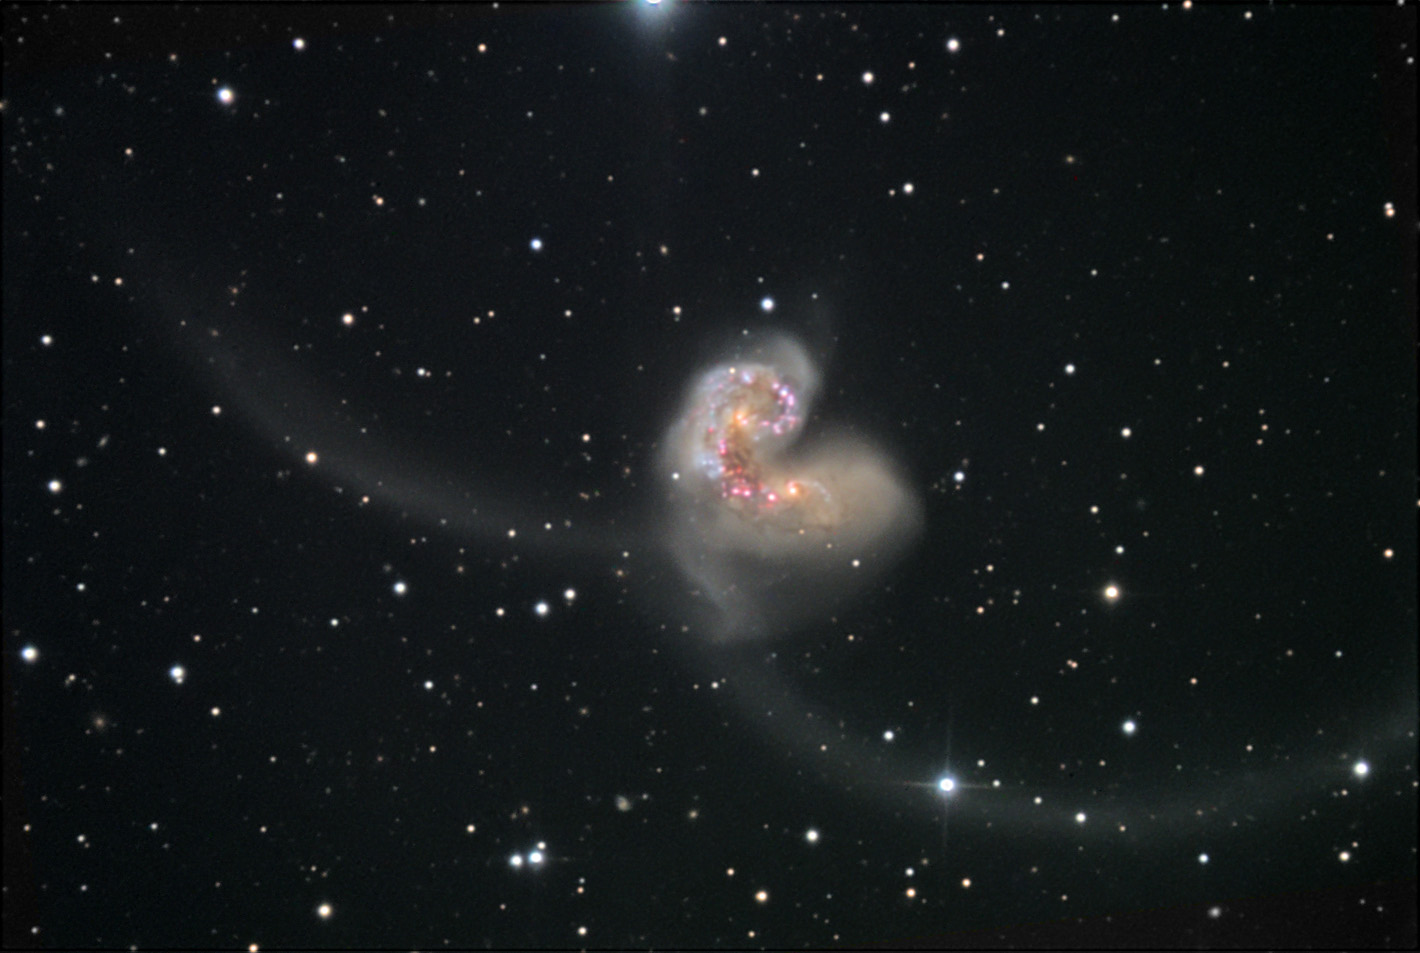

Wide view of the Antennae galaxies [ground-based]

This photo of the Antennae galaxies was taken with one of the NOAO telescopes from the ground.

Credit: NOAO/AURA/NSF, B. Twardy, B. Twardy, and A. Block (NOAO)